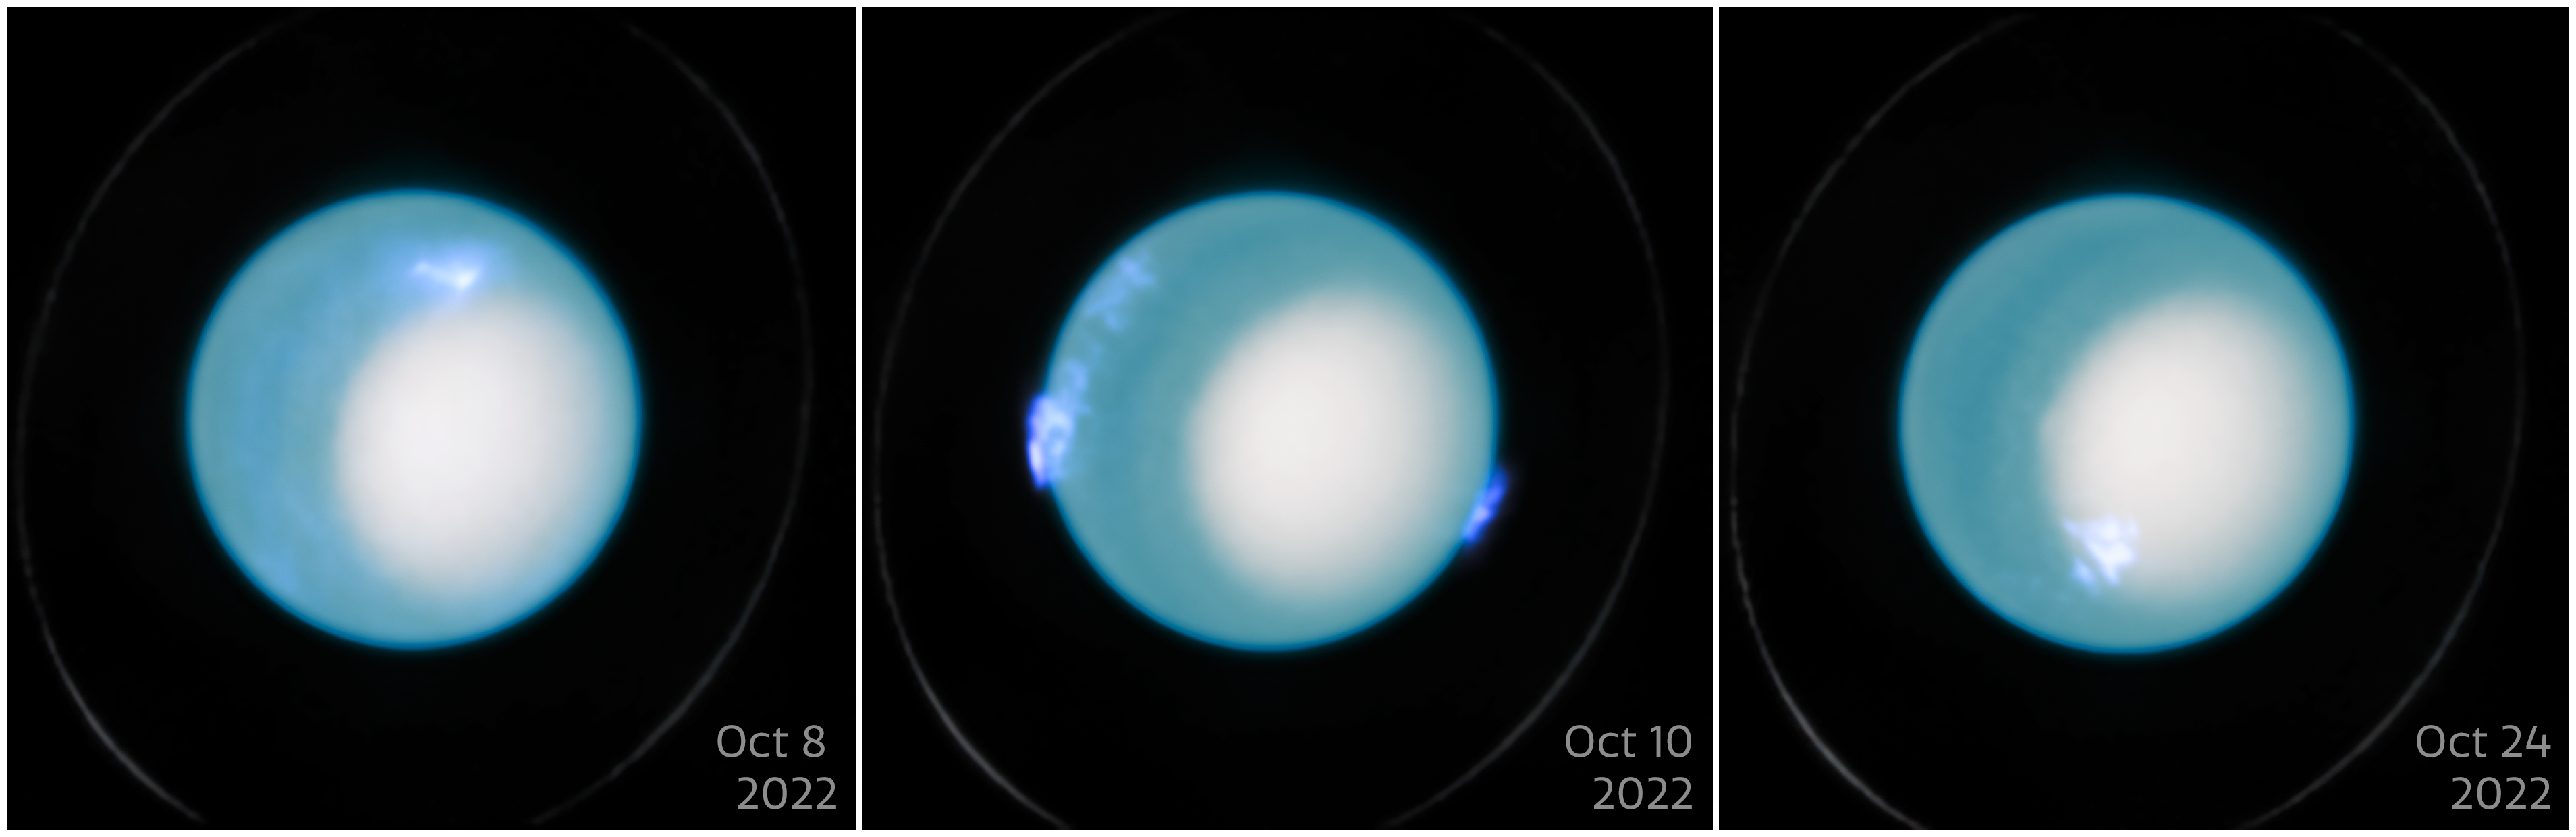

Uranus aurorae (October 2022)

This visual showcases 3 images from the NASA/ESA Hubble Space Telescope of the dynamic aurora on Uranus in October 2022. These observations were made by the Space Telescope Imaging Spectrograph (STIS) and includes both visible and ultraviolet data.

An international team of astronomers used Hubble to make new measurements of Uranus' interior rotation rate by analysing more than a decade of the telescope’s observations of Uranus’ aurorae. This refinement of the planet’s rotation period achieved a level of accuracy 1000 times greater than previous estimates and serves as a crucial new reference point for future planetary research.

Credit: ESA/Hubble, NASA, L. Lamy, L. Sromovsky